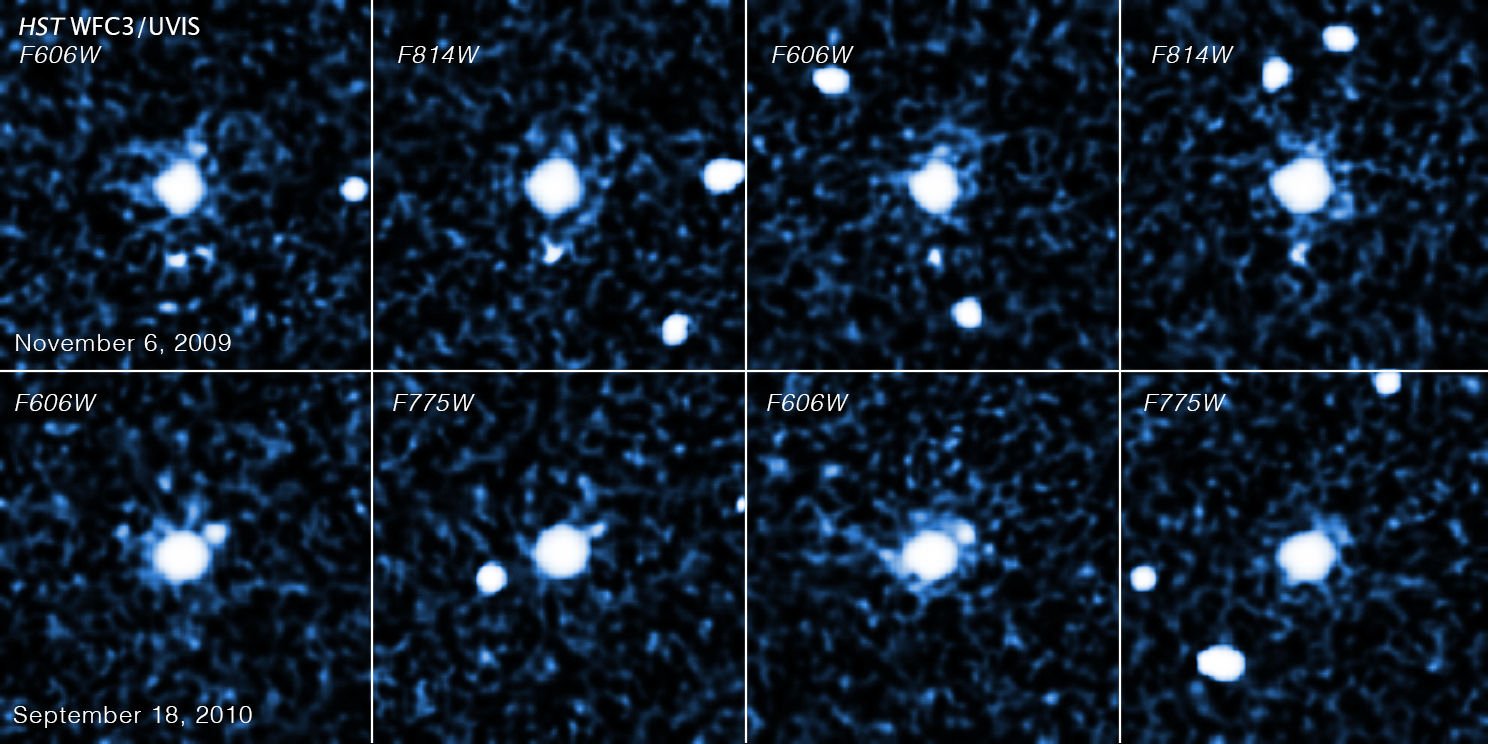

Hubble Images of 2007 OR10

This sequence of images, taken by the NASA/ESA Hubble Space Telescope's Wide Field Camera 3, shows a moon circling the trans-Neptunian object 2007 OR10. The top four images were taken on 6 November 2009; the bottom four on 18 September 2010.

As 2007 OR10 orbits the Sun, it changes position with respect to the background stars (the bright objects that change from panel to panel). The snapshots reveal that the moon moves with the trans-Neptunian object, proving that it is gravitationally bound to the larger body.

2007 OR10 is the third-largest known trans-Neptunian object, behind Pluto and Eris, and the largest unnamed world in the Solar System. The pair is located in the Kuiper Belt, a realm of icy debris left over from the solar system's formation.

The trans-Neptunian object is about 1520 kilometres across; the moon is estimated to be 240 kilometres to 400 kilometres in diameter. 2007 OR10, like Pluto, follows an eccentric orbit, but it is currently three times farther than Pluto is from the Sun.

Credit: NASA, ESA, C. Kiss (Konkoly Observatory), and J. Stansberry (STScI)